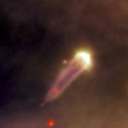

177-341E

One of 42 new proplyds discovered in the Orion Nebula, 177-341E is one of the bright proplyds that lies relatively close to the nebula’s brightest star, Theta 1 Orionis C. The tadpole-shaped tail is actually a jet of matter flowing away from the excited cusp.

Credit: NASA/ESA and L. Ricci (ESO)